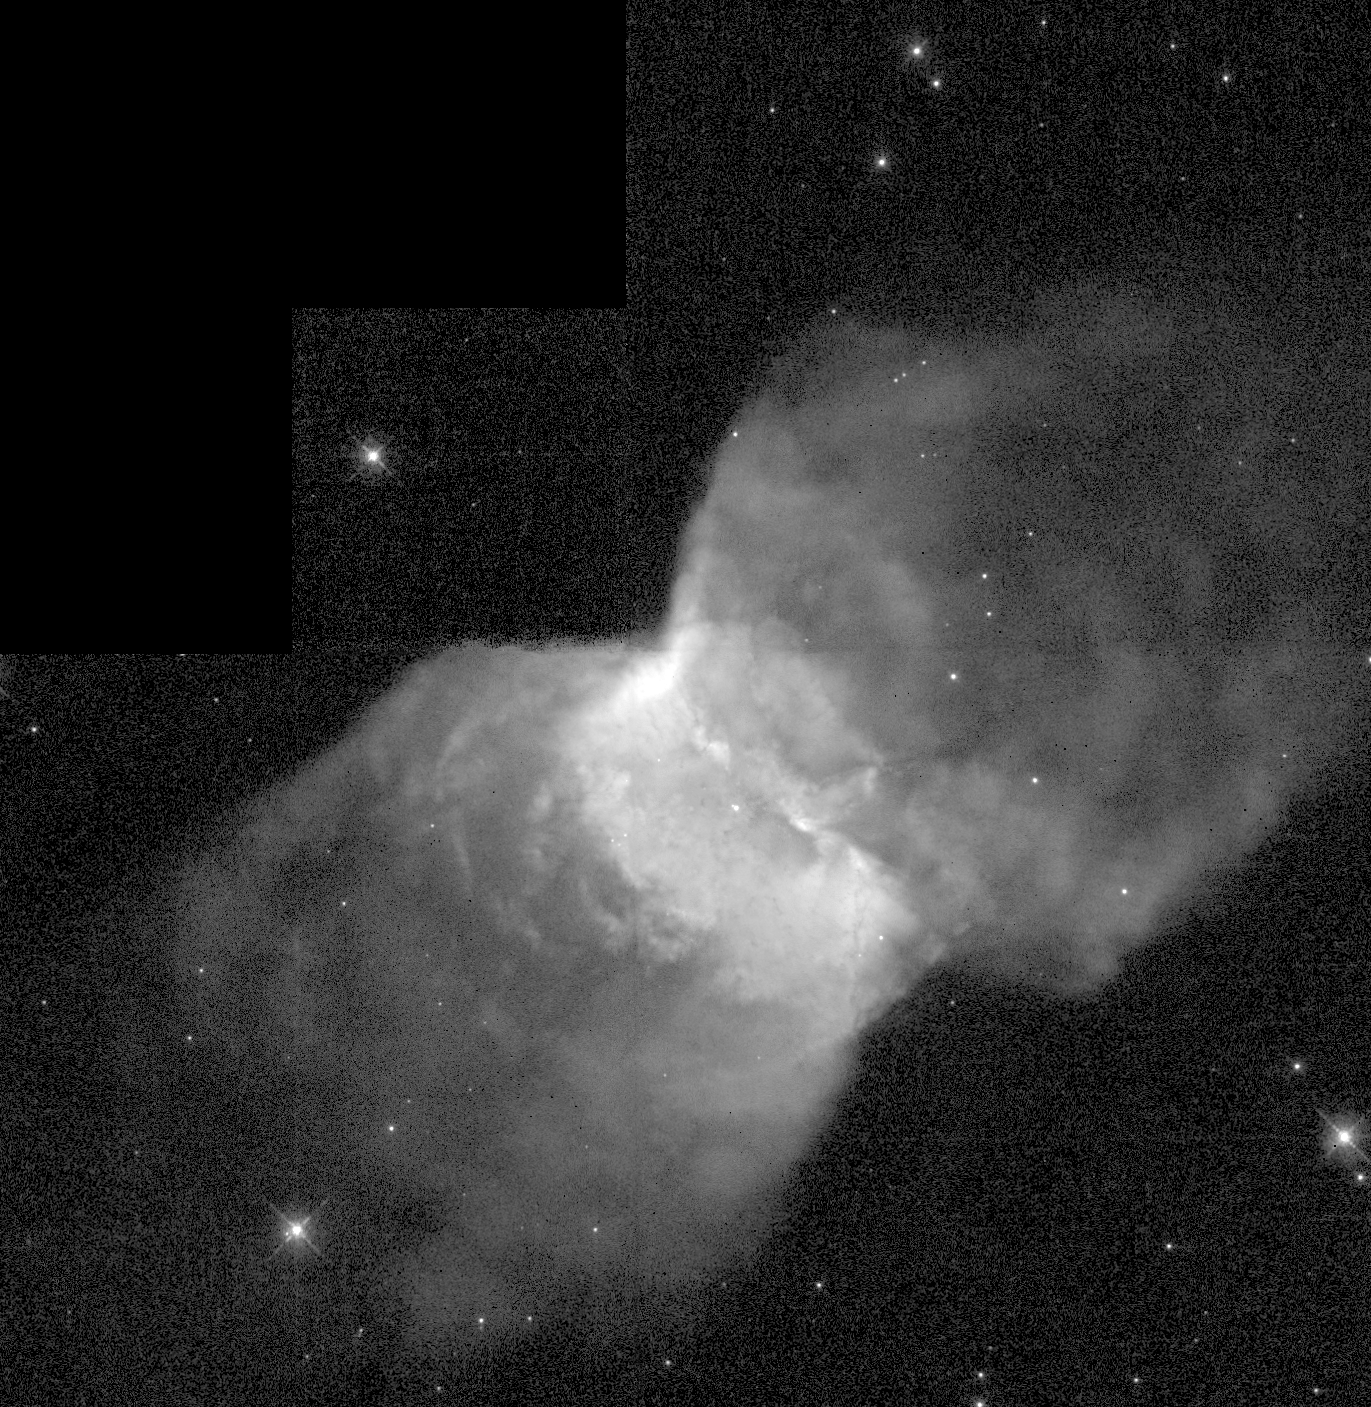

Hubble Camera Resumes Science Operation With Picture Of 'Butterfly' In Space

The Hubble Space Telescope's Wide Field and Planetary Camera 2(WFPC2) is back at work, capturing this black-and-white image of the 'butterfly wing'-shaped nebula, NGC 2346. The nebula is about 2, 000 light-years away from Earth in the direction of the constellation Monoceros. It represents the spectacular 'last gasp' of a binary star system at the nebula's center.

Credit: Massimo Stiavelli (STScI), and NASA/ESA